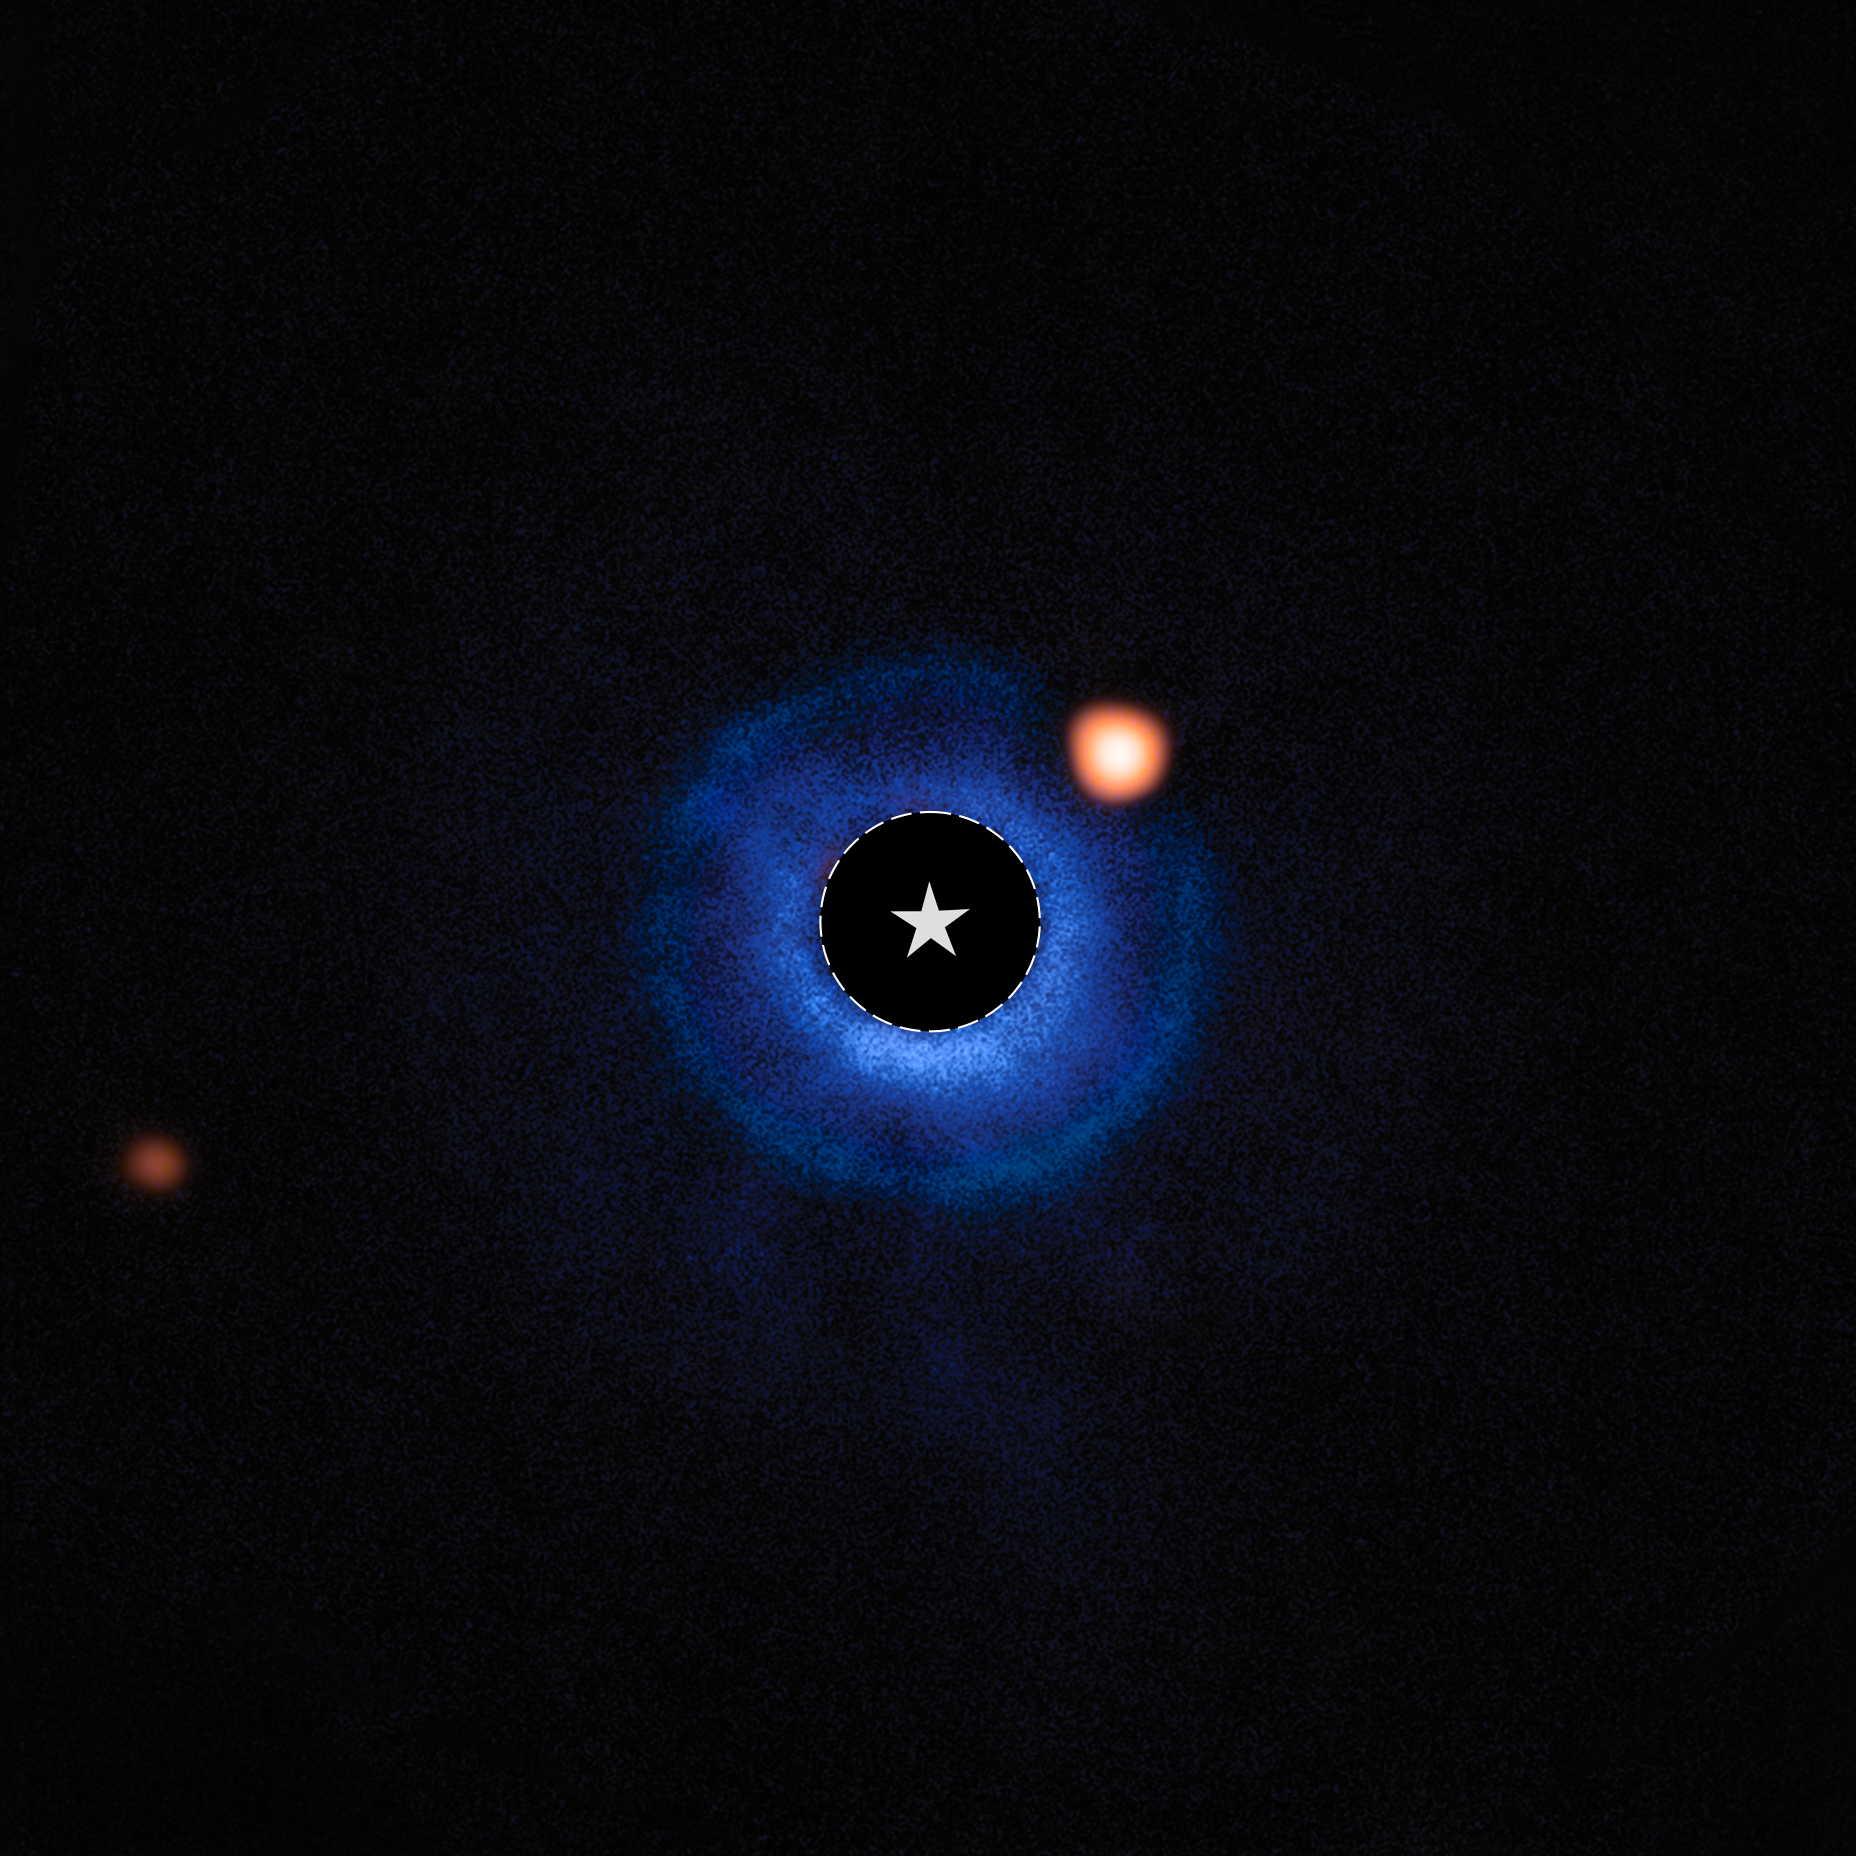

High-contrast coronograph image of TWA 7b

Astronomers using the NASA/ESA/CSA James Webb Space Telescope have captured compelling evidence of a planet with a mass similar to Saturn orbiting the young nearby star TWA 7. If confirmed, this would represent Webb’s first direct image discovery of a planet, and the lightest planet ever seen with this technique.

Using the coronagraph on Webb’s Mid-Infrared Instrument (MIRI) on 21 June 2024, the team carefully suppressed the bright glare of the host star to reveal faint nearby objects. This technique, called high-contrast imaging, enables astronomers to directly detect planets that would otherwise be lost in the overwhelming light from their host star. After subtracting residual starlight using advanced image processing, a faint infrared source was revealed near TWA 7, distinguishable from background galaxies or Solar System objects. The source is located in a gap in one of three dust rings that were discovered around TWA 7 by previous ground-based observations. Its brightness, colour, distance from the star, and position within the ring are consistent with theoretical predictions for a young, cold, Saturn-mass planet sculpting the surrounding debris disc.

Initial analysis suggests that the object — referred to as TWA 7b — could be a young, cold planet with a mass around 0.3 times that of Jupiter (~100 Earth masses) and a temperature near 320 Kelvin (roughly 47 degrees Celsius).

In this image from MIRI, light from the star TWA 7 has been subtracted. The location of the star is marked with a circle and a star symbol at the centre of the image. This leaves light from the debris disc around the star, as well as other infrared sources, visible. The bright spot to the upper right of the star is the source identified as TWA 7b, within the debris disc. The more distant orange spot visible in the left of the image is an unrelated background star.

Only a single MIRI band was used in this image (seen here in orange). The blue colour visible in the image results from an additional band taken by the SPHERE instrument of ESO's Very Large Telescope (VLT), which showcases the location of the disc surrounding the host star and the exoplanet creating a gap within the disc that is revealed by MIRI.

Credit: ESA/Webb, NASA, CSA, A.M. Lagrange, M. Zamani (ESA/Webb)